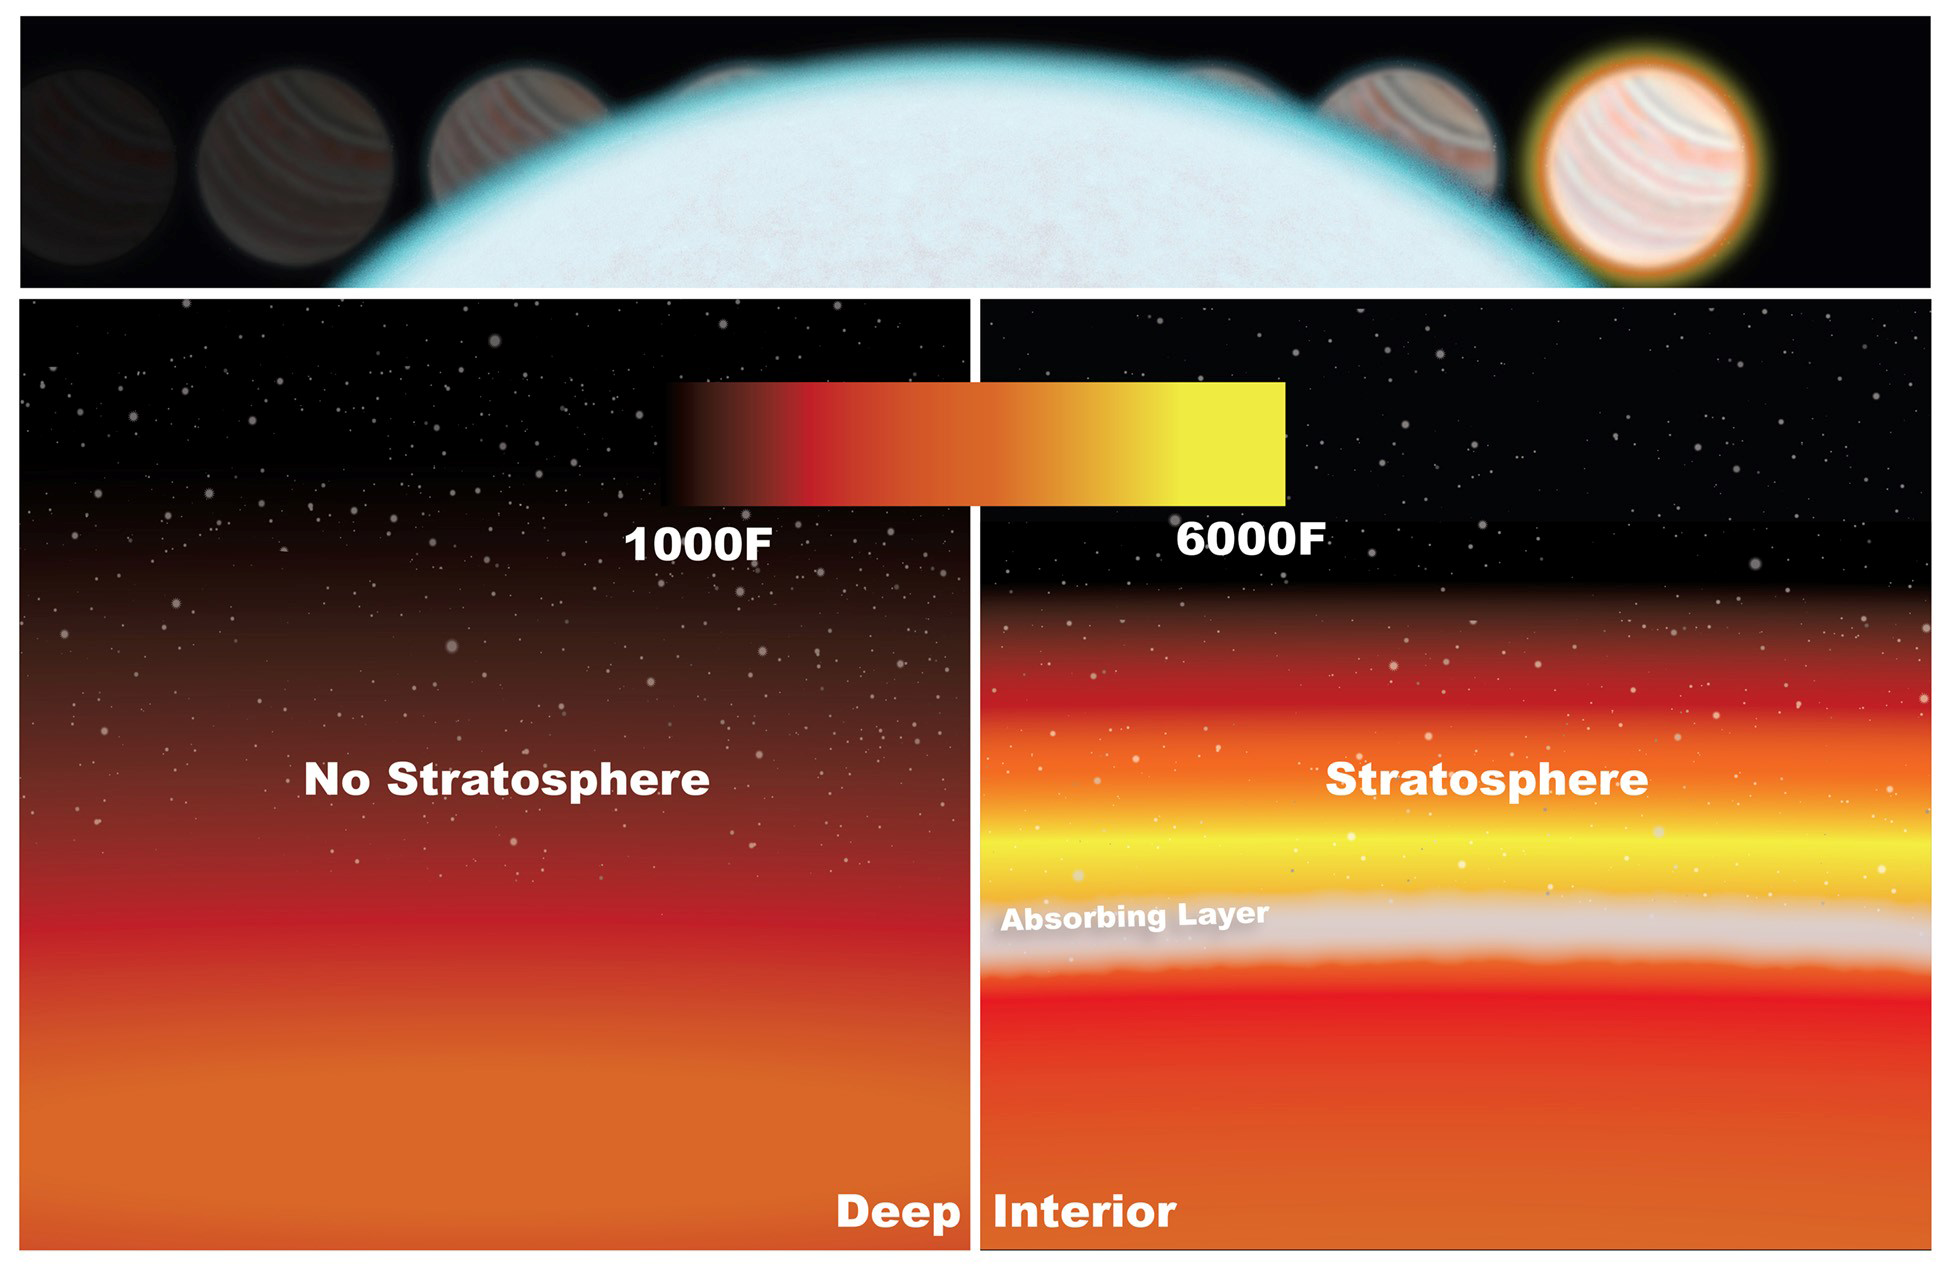

Artist’s illustration of temperature inversion in exoplanet’s atmosphere

NASA scientists detected a stratosphere on WASP-33b by measuring the drop in light as the planet passed behind its star (top). Temperatures in the low stratosphere rise (right) because of molecules absorbing radiation from the star; otherwise, temperatures would cool down at higher altitudes (left).

Credit: NASA, ESA, and K. Haynes and A. Mandell (Goddard Space Flight Center)